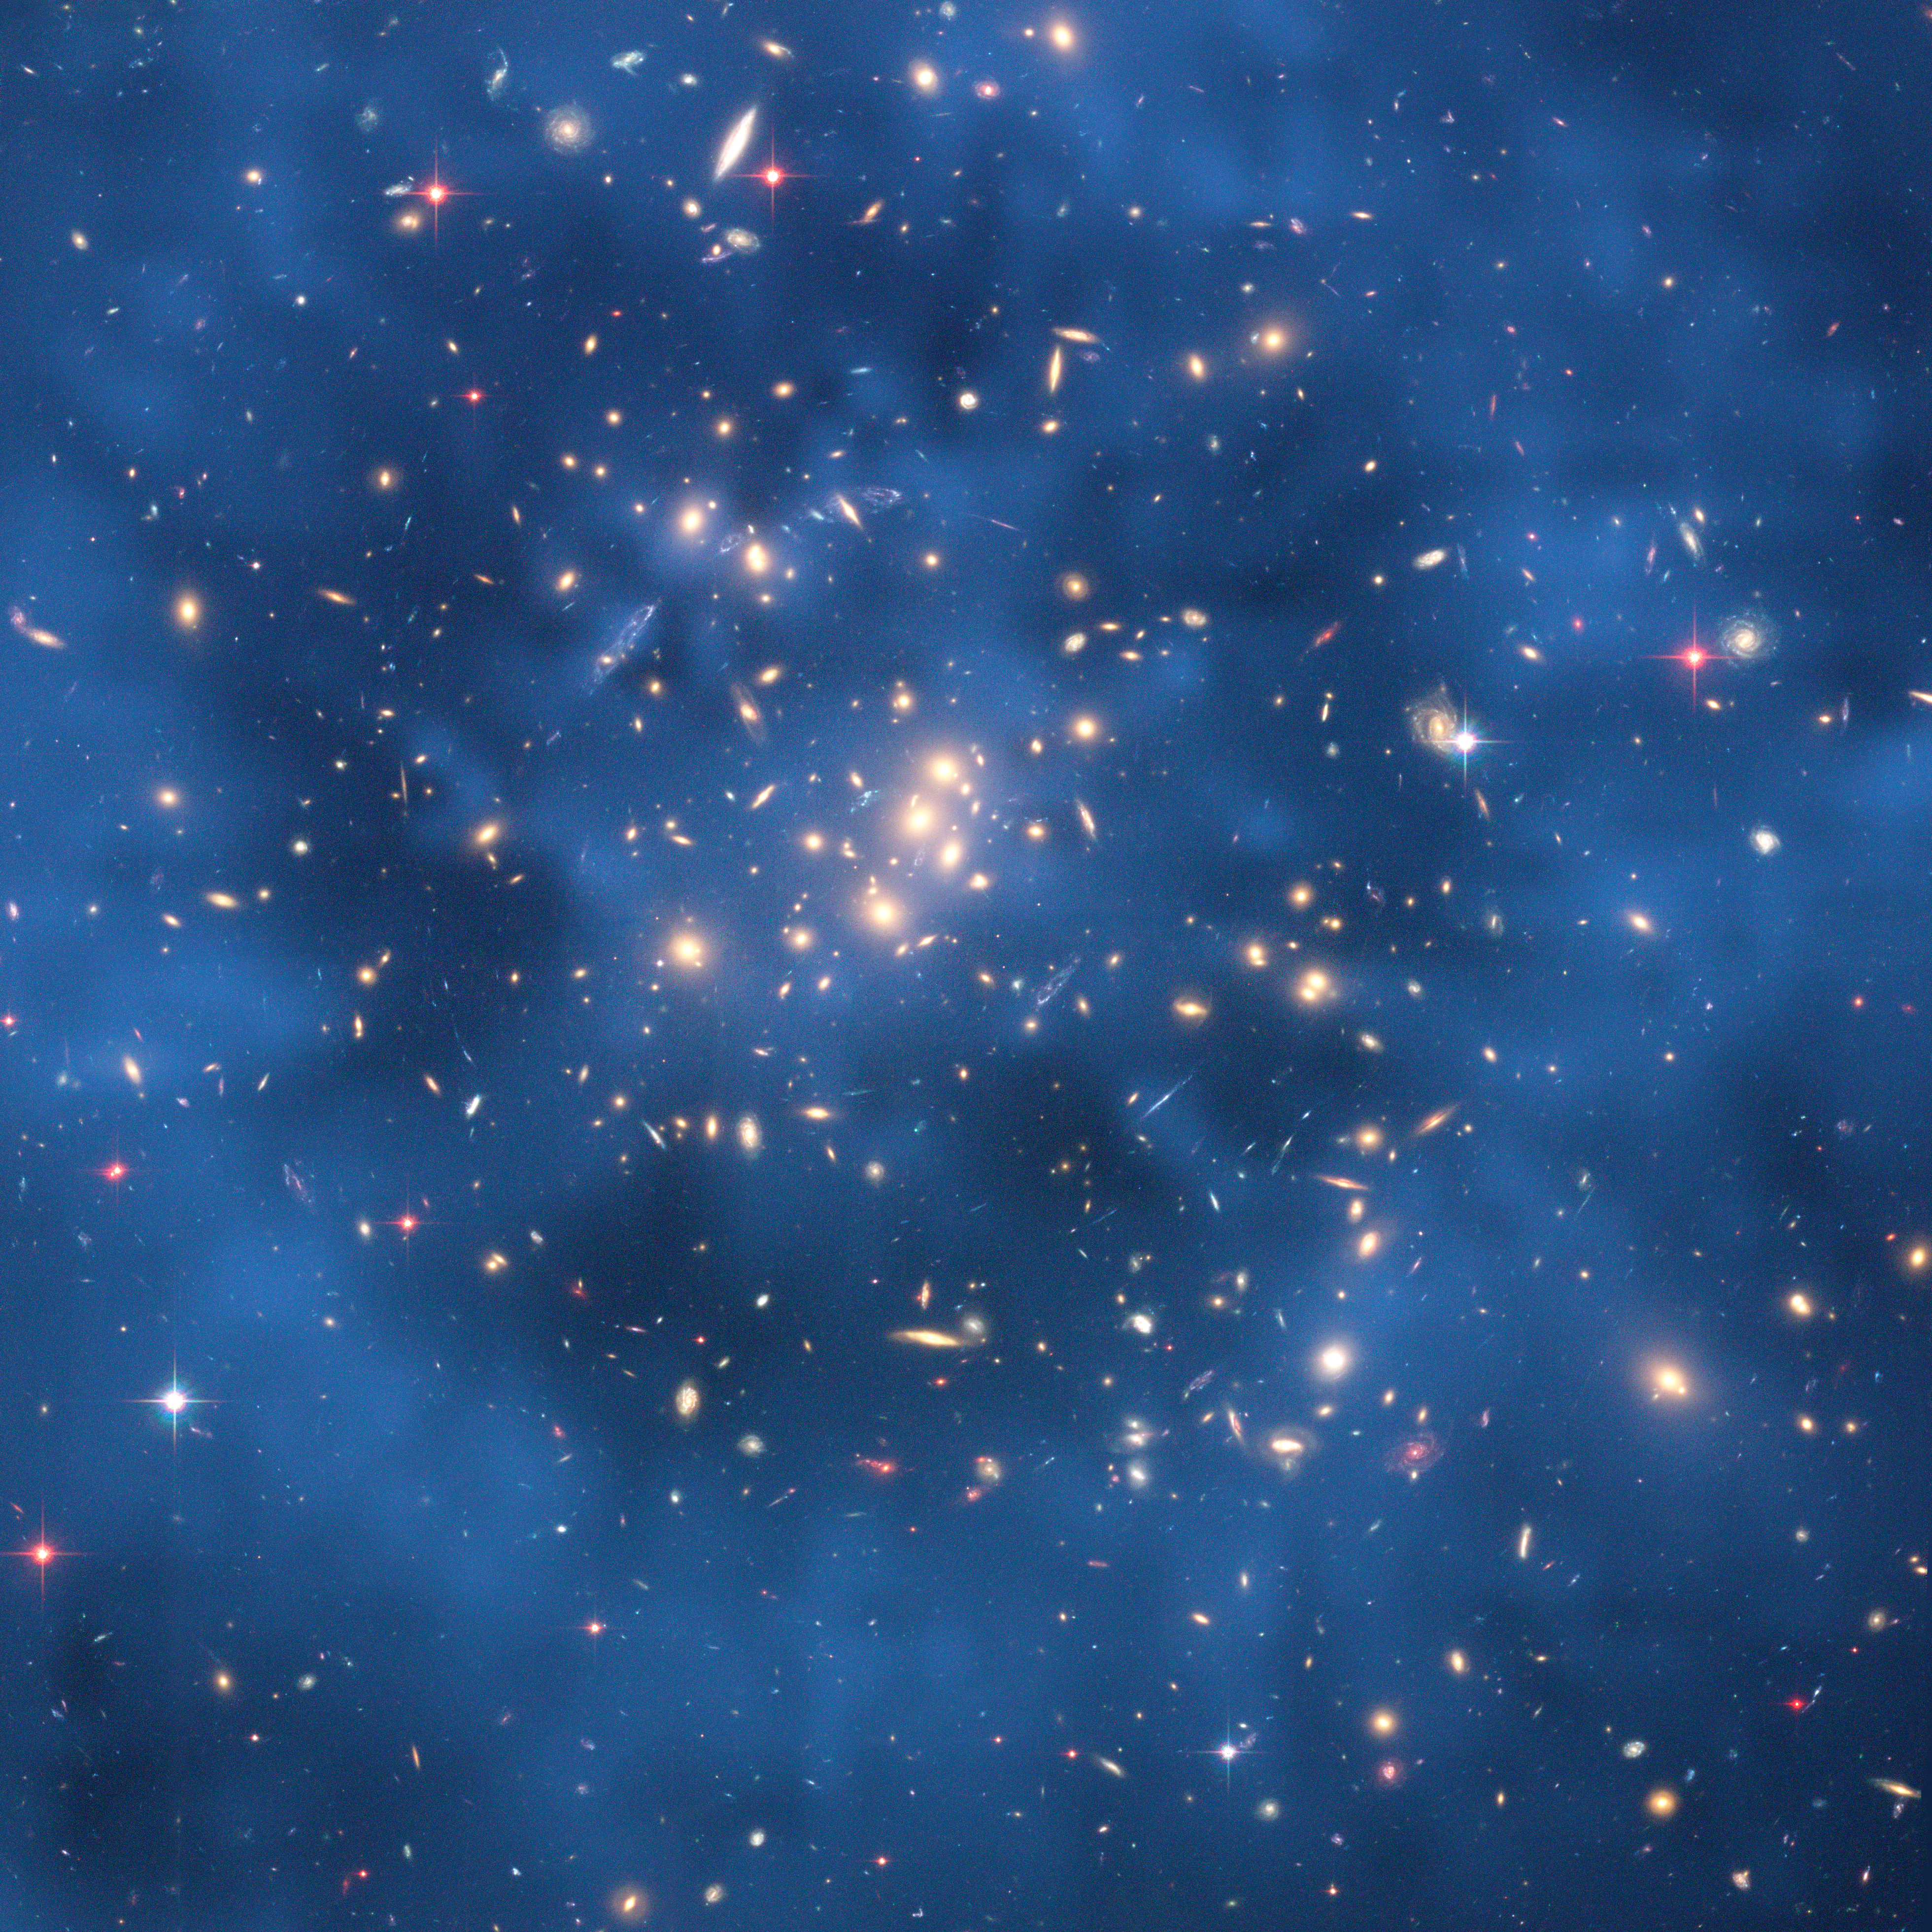

Dark matter ring in galaxy cluster Cl 0024+17 (ZwCl 0024+1652)

This Hubble Space Telescope composite image shows a ghostly "ring" of dark matter in the galaxy cluster ZwCl0024+1652.

The ring-like structure is evident in the blue map of the cluster's dark matter distribution. The map is superimposed on a Hubble image of the cluster. The ring is one of the strongest pieces of evidence to date for the existence of dark matter, an unknown substance that pervades the Universe.

The map was derived from Hubble observations of how the gravity of the cluster ZwCl0024+1652 distorts the light of more distant galaxies, an optical illusion called gravitational lensing. Although astronomers cannot see dark matter, they can infer its existence by mapping the distorted shapes of the background galaxies. The mapping also shows how dark matter is distributed in the cluster.

Astronomers suggest that the dark-matter ring was produced from a collision between two gigantic clusters.

Dark matter makes up the bulk of the Universe's material and is believed to make up the underlying structure of the cosmos.

The Hubble observations were taken in November 2004 by the Advanced Camera for Surveys (ACS). Thanks to the exquisite resolution of the ACS, astronomers saw the detailed cobweb tracery of gravitational lensing in the cluster.

Credit: NASA, ESA, M.J. Jee and H. Ford (Johns Hopkins University)